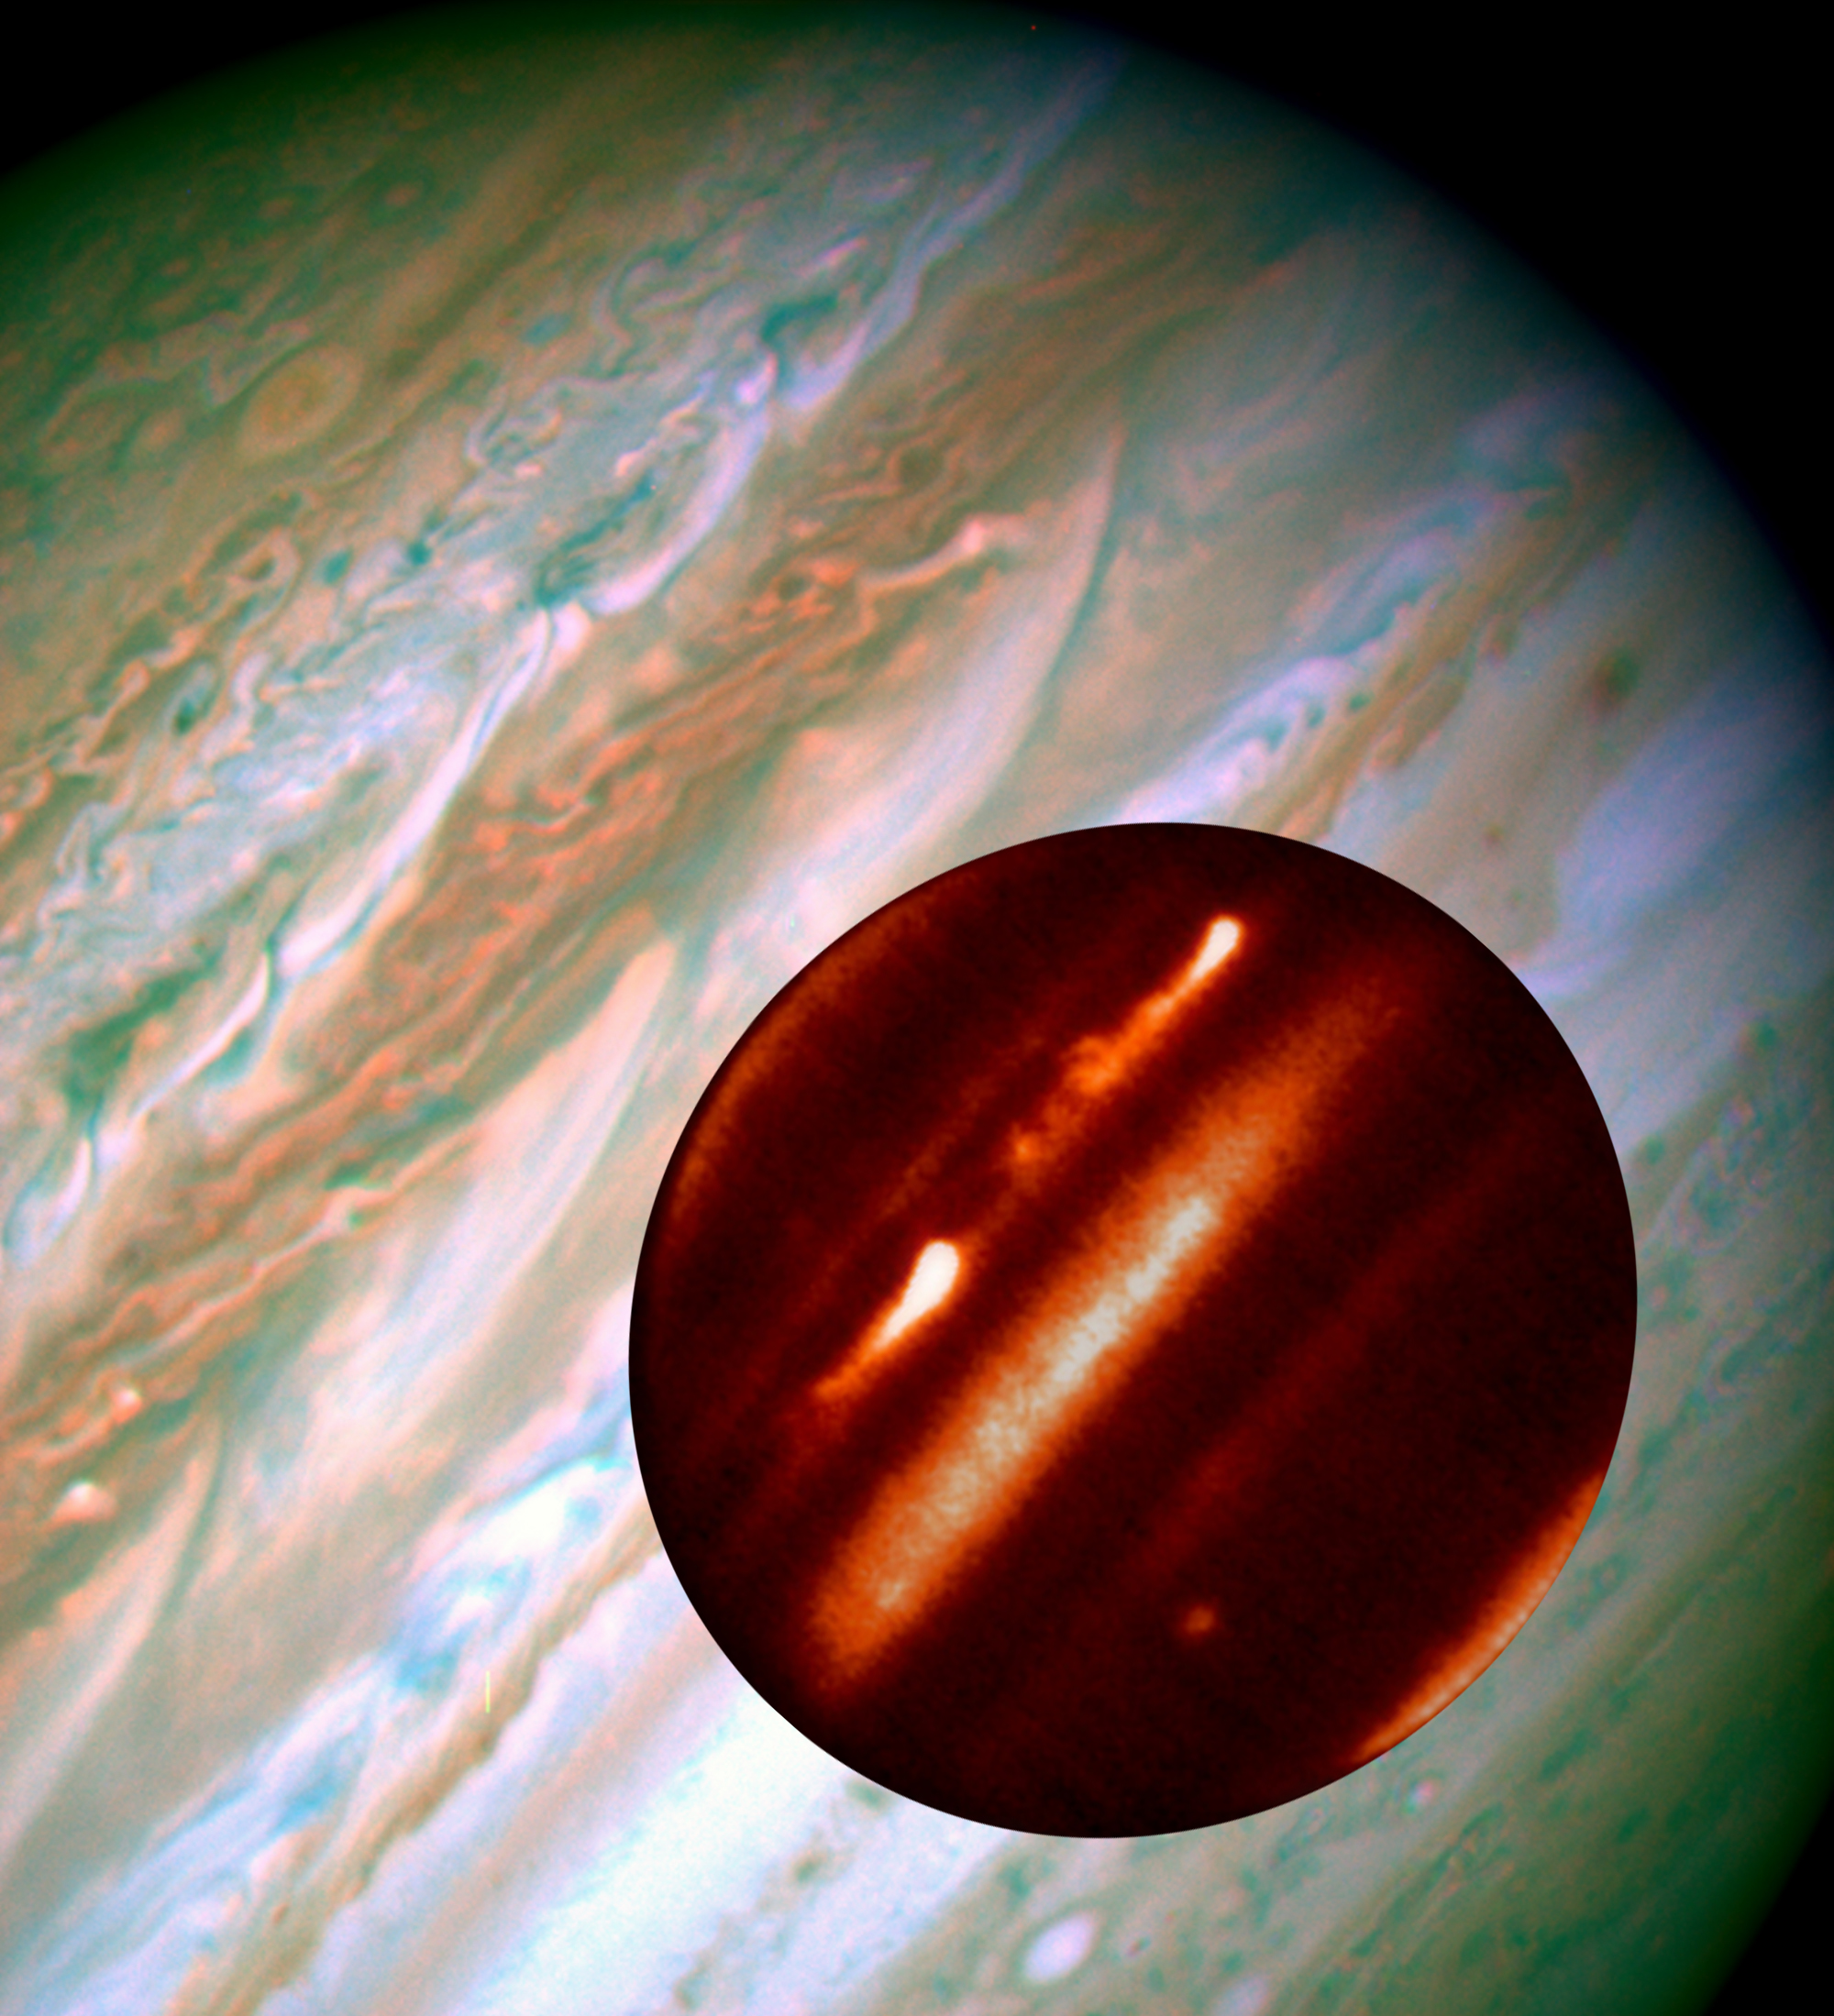

Hubble/IRTF Composite Image of Jupiter Storms

The background image is from Hubble Space Telescope and shows the turbulent pattern generated by the two plumes on May 11, 2007 (upper left part of Jupiter). The two bright plumes detach in the superimposed small infrared image obtained at the NASA-IRTF facility a month before, on April 5, 2007.

Credit: NASA/ESA, IRTF, and A. Sÿnchez-Lavega and R. Hueso (Universidad del País Vasco, Spain)